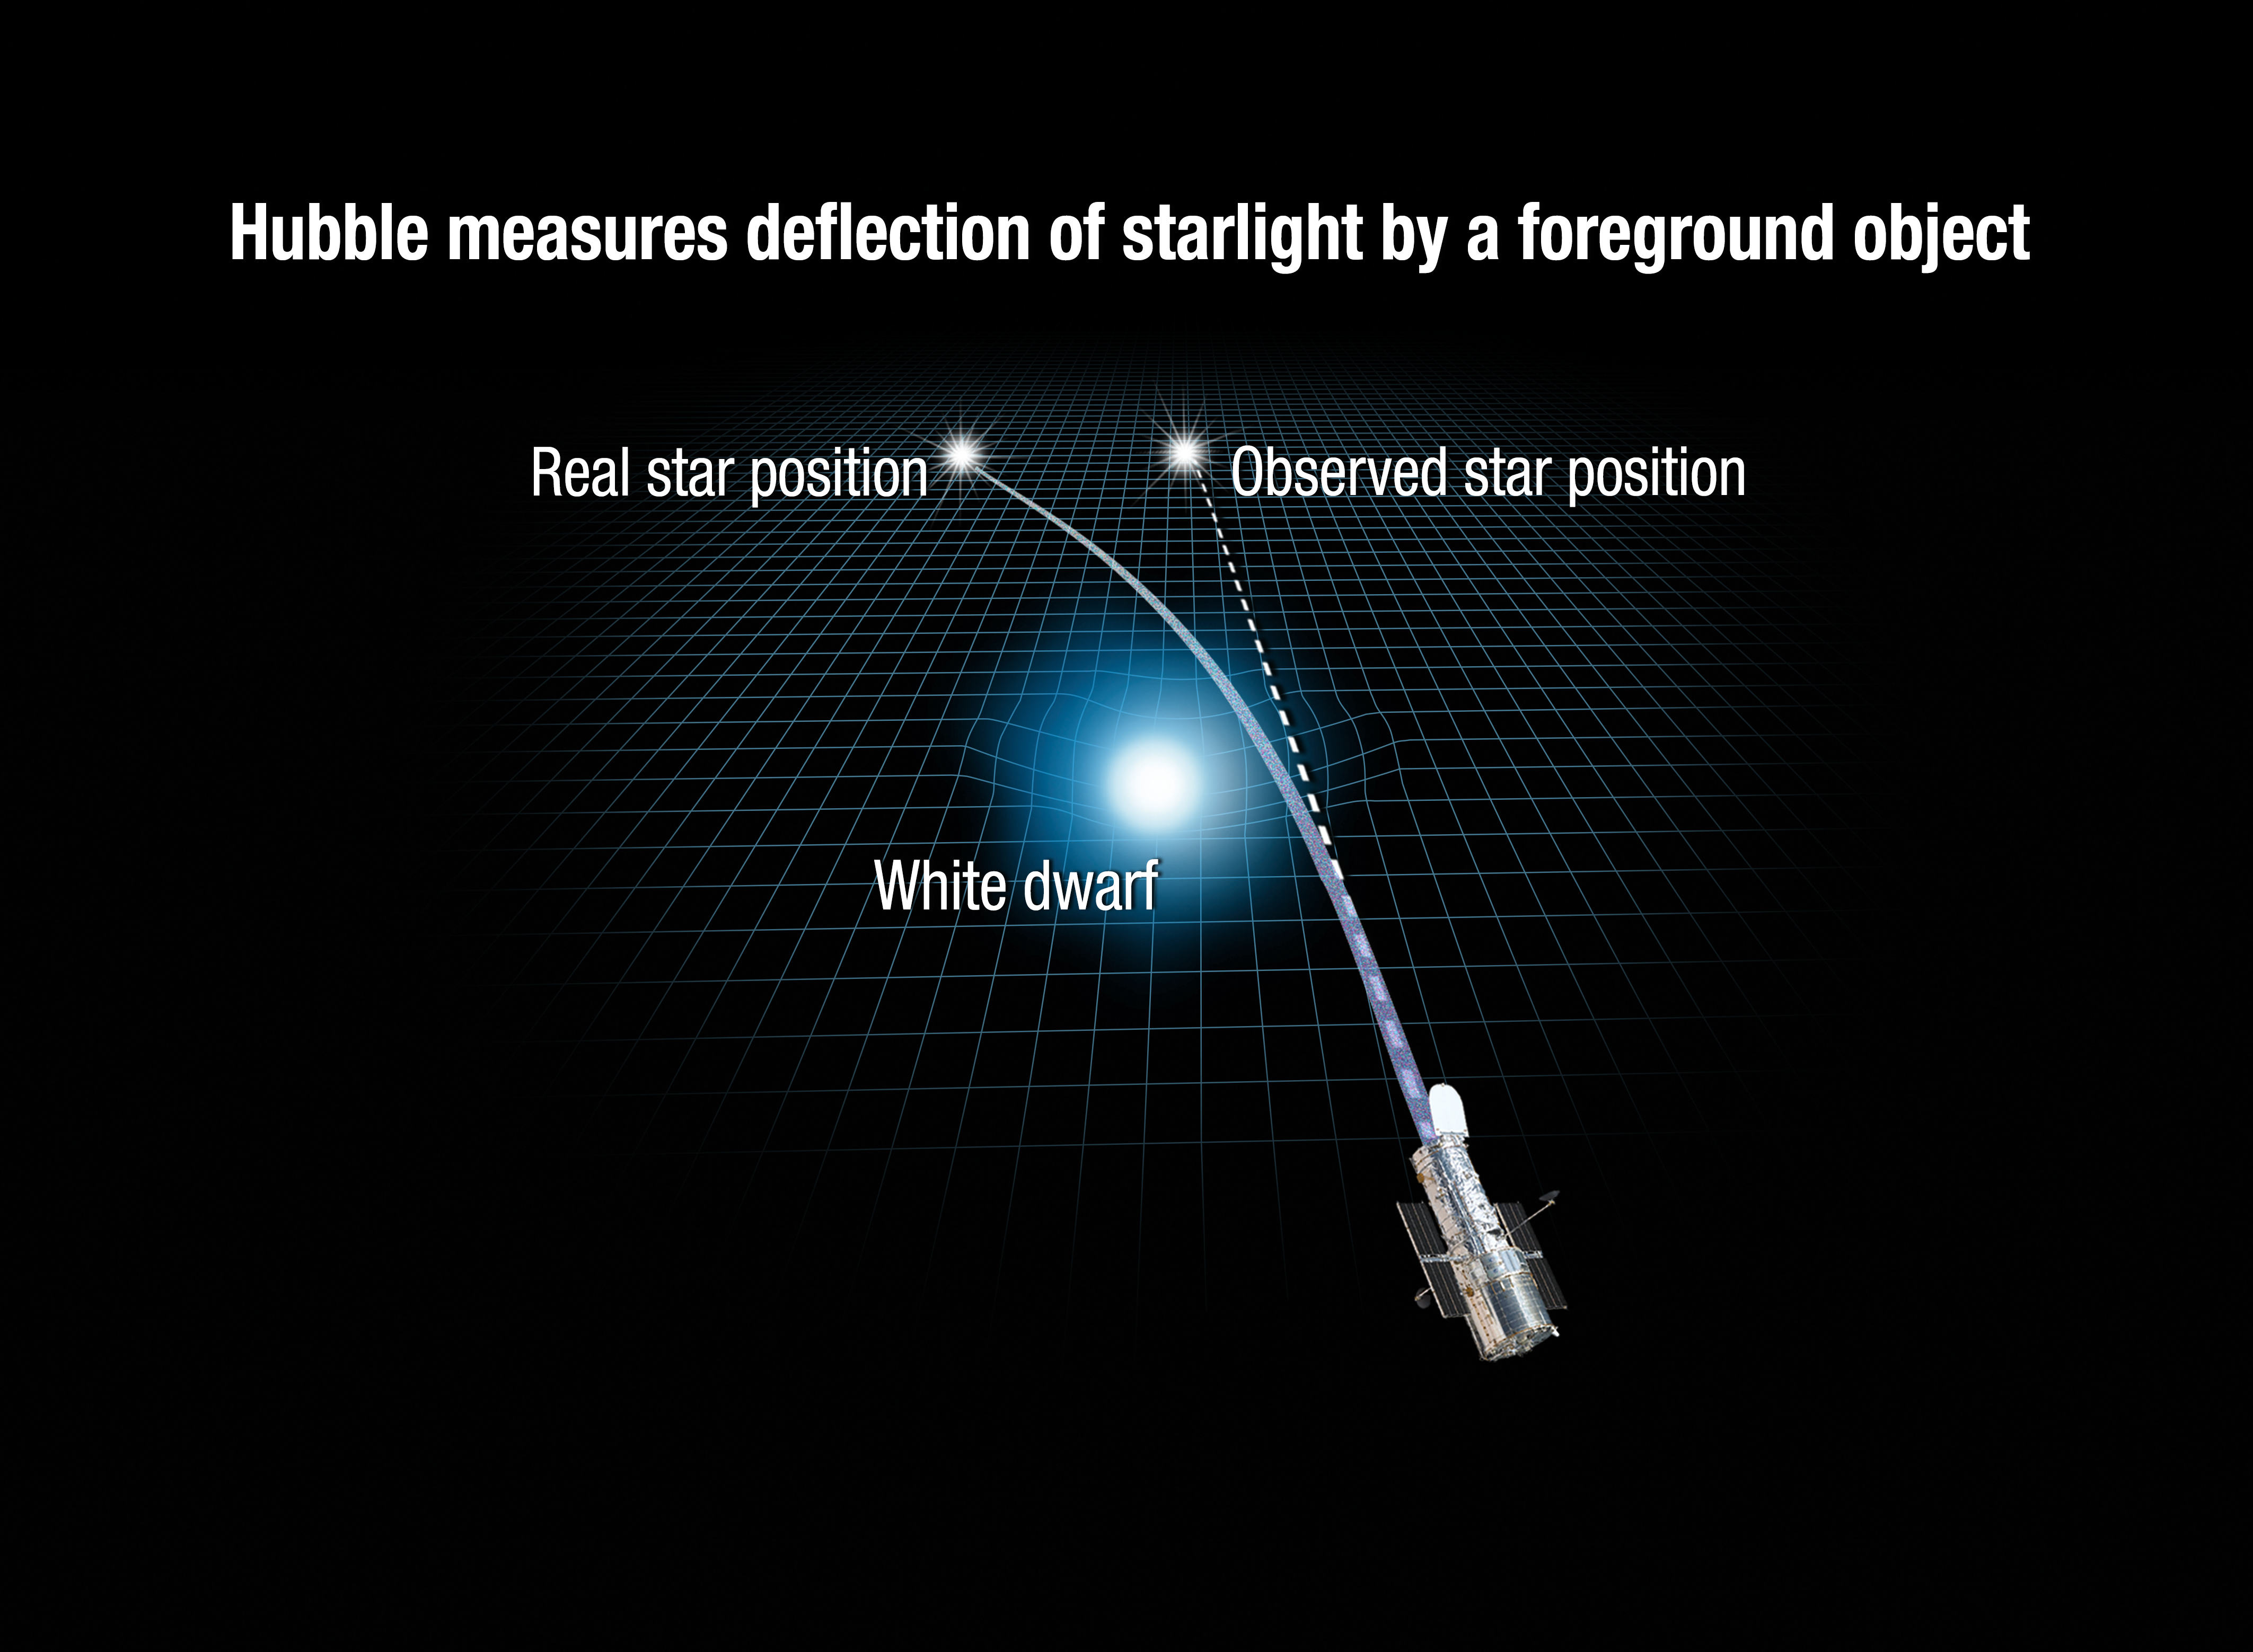

Hubble Measures Deflection of Starlight by a Foreground Object

This illustration shows how the gravity of a foreground white dwarf star warps space and bends the light from a distant star behind it. Astronomers using the NASA/ESA Hubble Space Telescope have for the first time directly measured the mass of a single, isolated star other than our Sun — thanks to this optical trick of nature. The target was a white dwarf — the surviving core of a burned-out Sun-like star. The greater the temporary, infinitesimal deflection of the background star’s image, the more massive the foreground star is. Researchers found that the dwarf is 56 percent the mass of our Sun.

This effect, called gravitational lensing, was predicted as a consequence of Einstein’s general theory of relativity from a century ago. Observations of a solar eclipse in 1919 provided the first experimental proof for general relativity. But Einstein didn’t think the same experiment could be done for stars beyond our Sun because of the extraordinary precision required.

Credit: NASA, ESA, A. Feild